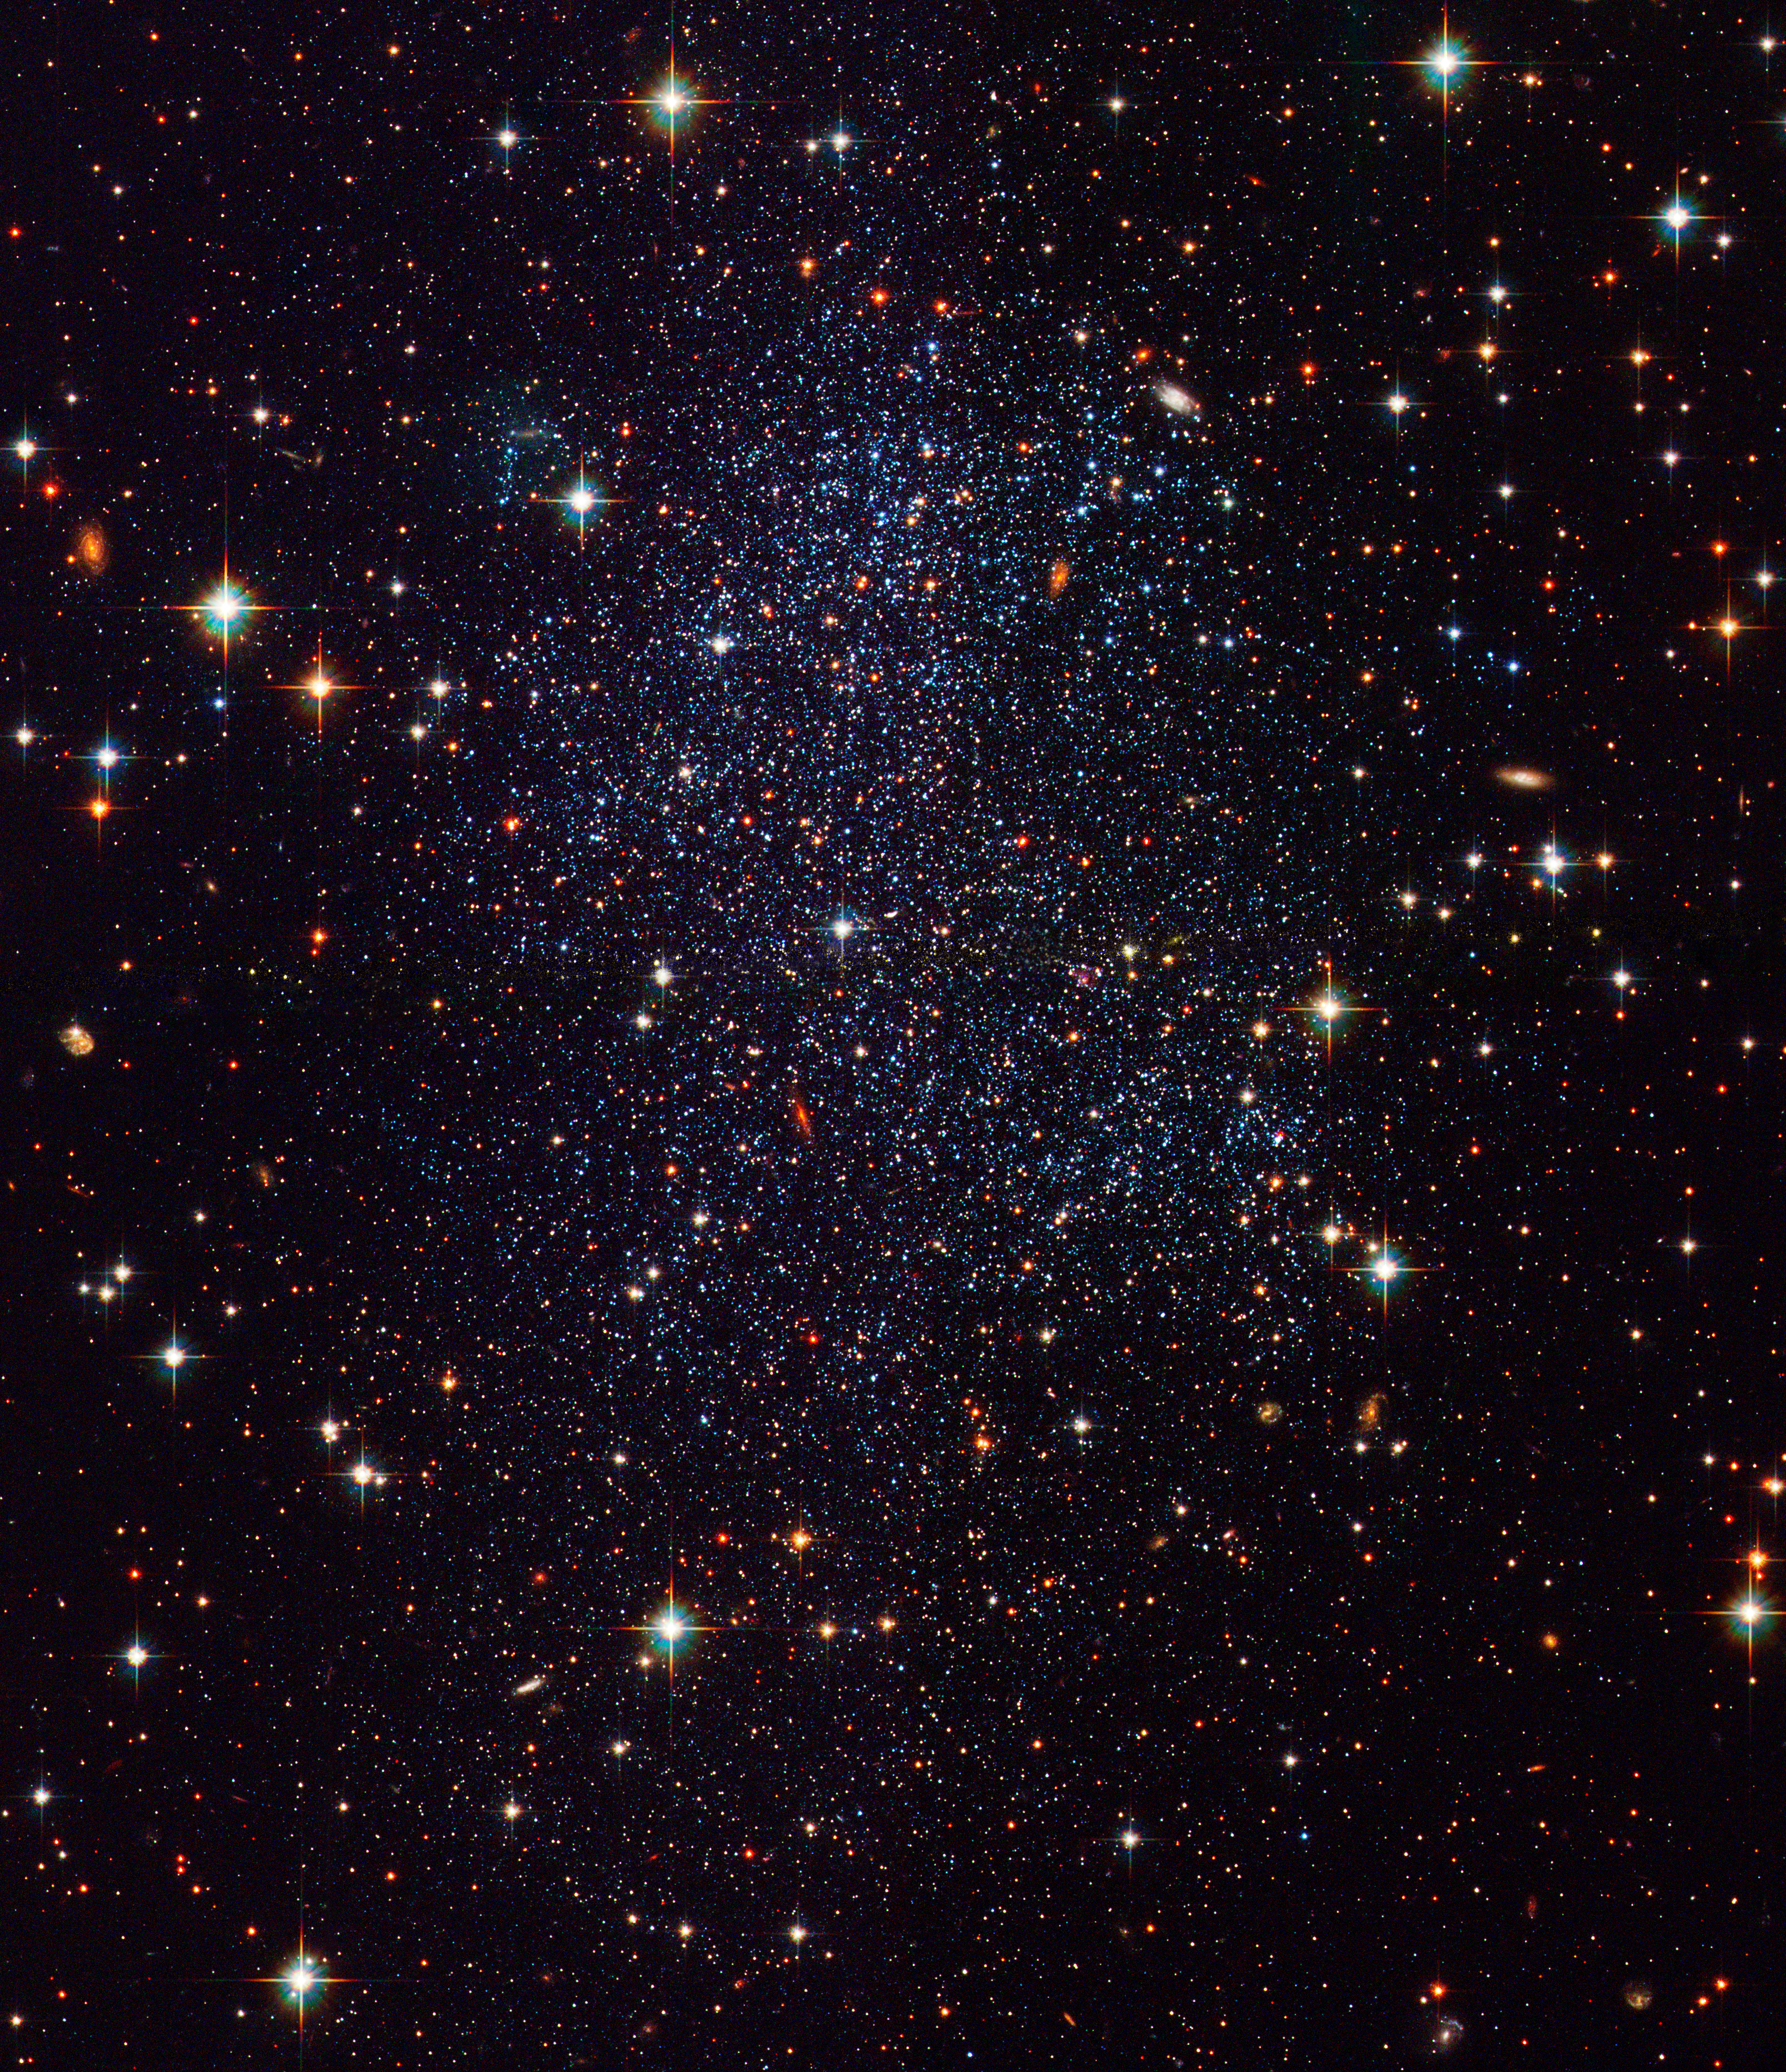

Hubble Images Sagittarius Dwarf Galaxy

This new image from the Hubble Space Telescope shows a small galaxy called the Sagittarius dwarf irregular galaxy, or "SagDIG" for short. SagDIG is relatively nearby, and Hubble's sharp vision is able to reveal many thousands of individual stars within the galaxy.

Credit: NASA, ESA, and The Hubble Heritage Team STScI/AURA)